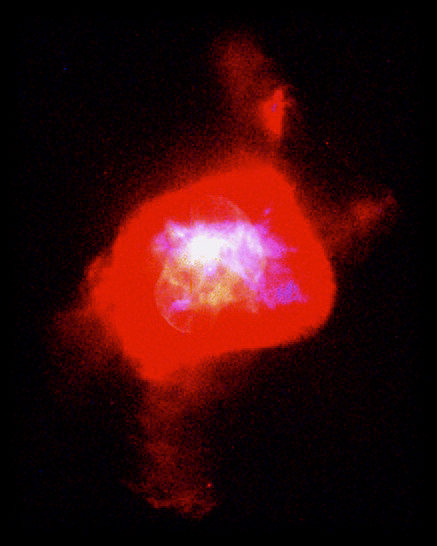

Planetary Nebula NGC 6210

The remarkable features of this nebula are the numerous holes in the inner shells with jets of material streaming from them. These jets produce column-shaped features that are mirrored in the opposite direction. The multiple shells of material ejected by the dying star give this planetary nebula its odd form. In the 'full nebula' image, the brighter central region looks like a 'nautilus shell'; the fainter outer structure (colored red) a 'tortoise.' The dying star is the white dot in the center.

Credit: Robert Rubin and Christopher Ortiz (NASA/ESA Ames Research Center), Patrick Harrington and Nancy Jo Lame (University of Maryland), Reginald Dufour (Rice University), and NASA/ESA